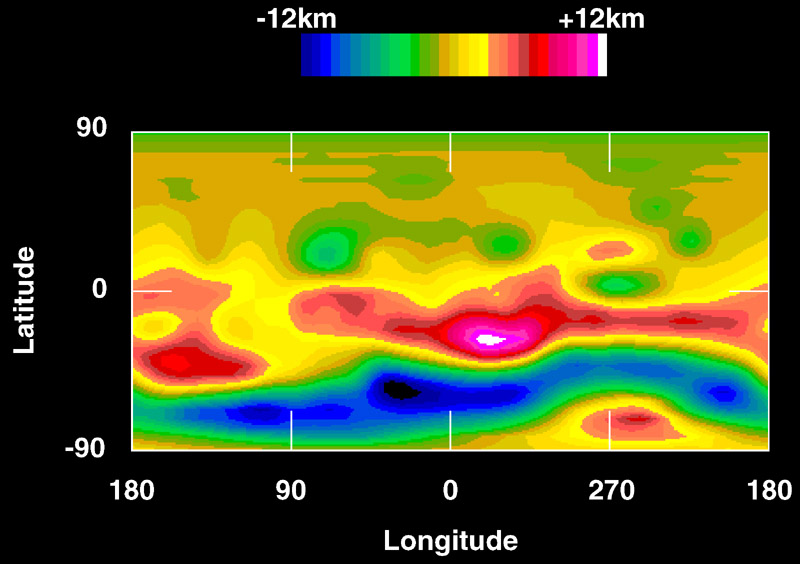

Crater on Asteroid Vesta

This topographic map of Vesta's surface, based on Hubble Space Telescope observations, is colour coded to reveal altitude variations above a mean surface level.

The southern pole is dominated by a depression (blue) which is a large impact feature.

Credit: Ben Zellner of Georgia Southern University; Peter Thomas, Cornell University, NASA/ESA